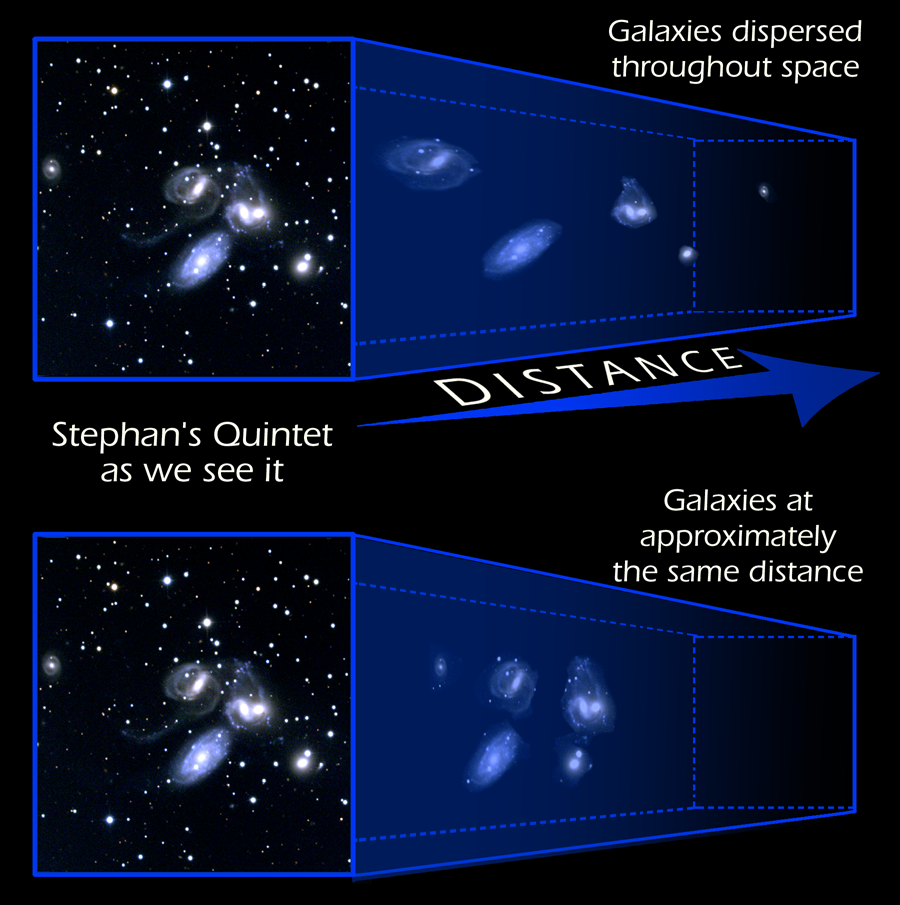

Stephan's quintet

Studying the star clusters and dwarf galaxies in Stephan's Quintet provides insights into how galactic encounters may have driven galaxy evolution in the early universe. The quintet resides 270 million light-years from Earth in the constellation Pegasus.

Credit: NASA & ESA